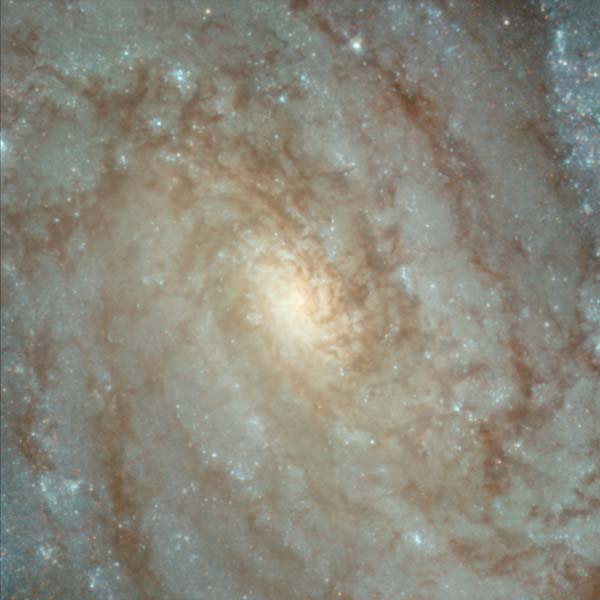

Details from ACS Image of NGC 3370: Center of Galaxy

The center of NGC 3370 shows well delineated dust lanes and an uncommonly ill-defined nucleus.

Credit: NASA/ESA, The Hubble Heritage Team and A. Riess (STScI)